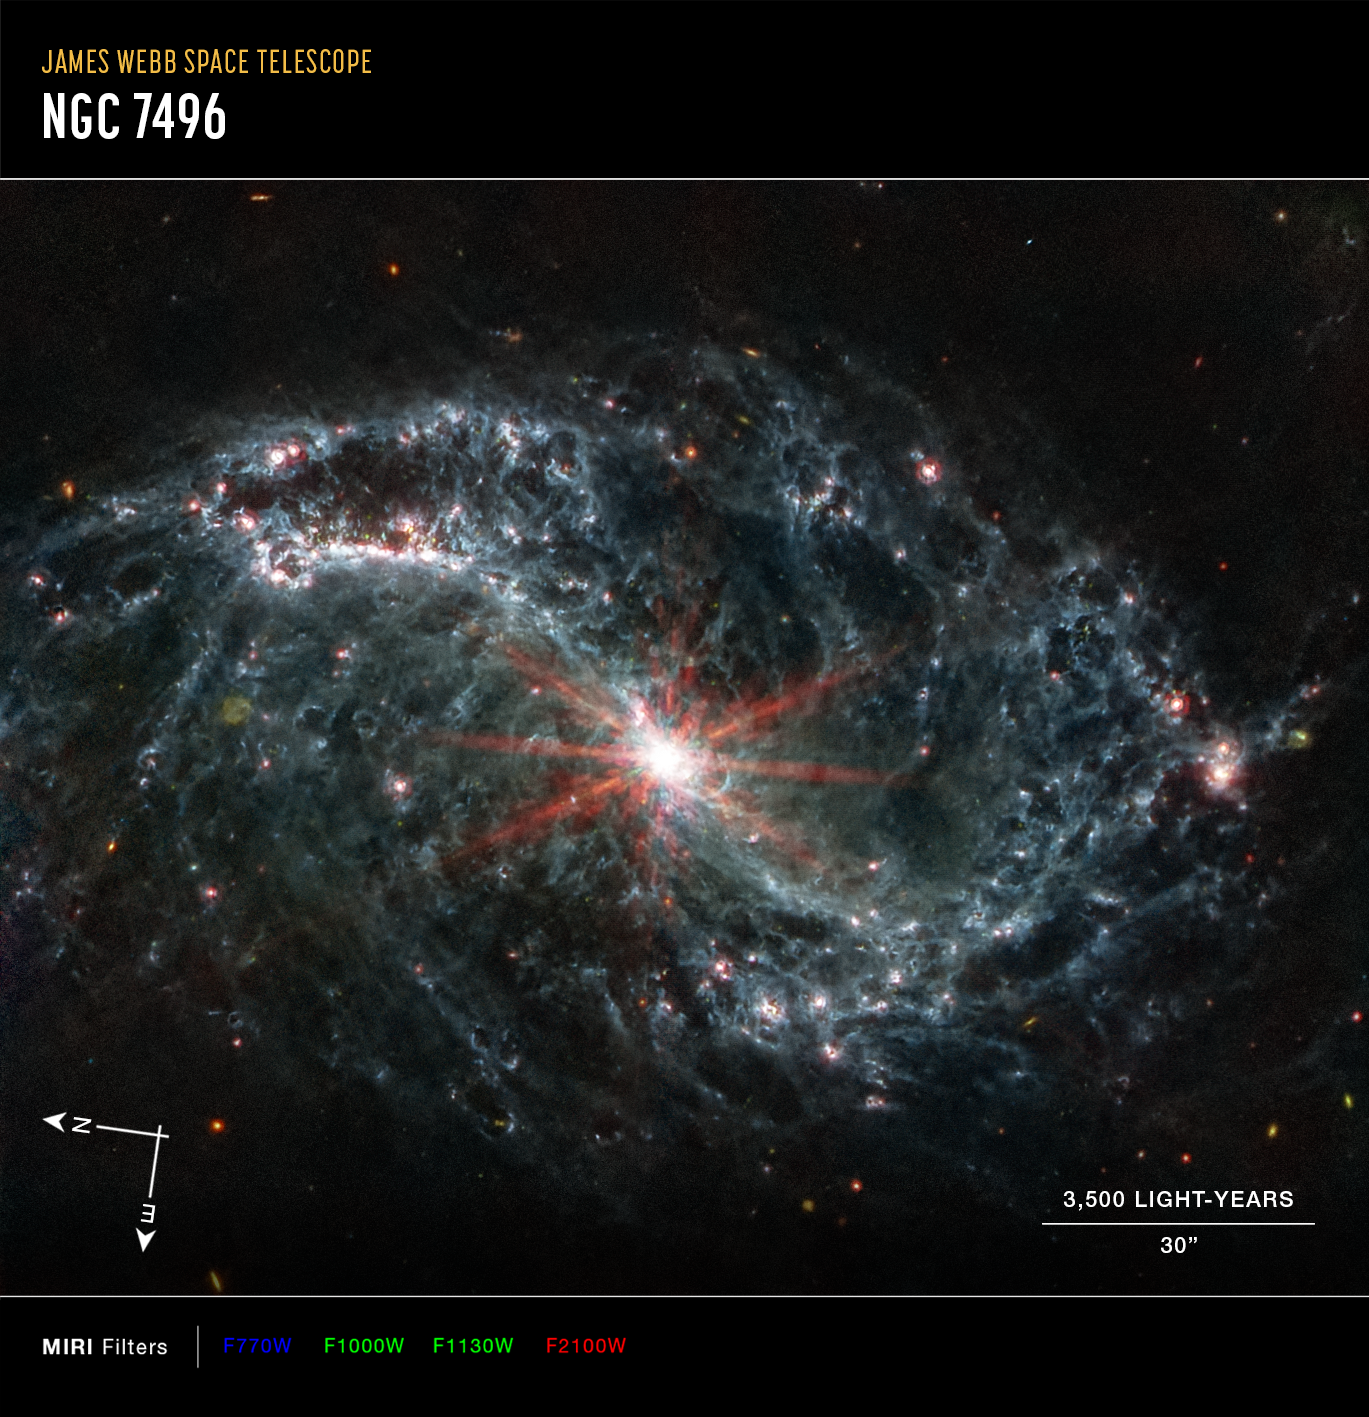

NGC 7496 (MIRI Image - Annotated)

This image of the nearby galaxy NGC 1433, captured by Webb’s Mid-Infrared Instrument (MIRI) shows compass arrows, scale bar, and color key for reference.

The north and east compass arrows show the orientation of the image on the sky. Note that the relationship between north and east on the sky (as seen from below) is flipped relative to direction arrows on a map of the ground (as seen from above). At the lower right is a scale bar labeled 3,500 light-years, 30 arcseconds. The length of the scale bar is approximately one-fifth the total width of the image. Below the image is a color key showing which MIRI filters were used to create the image and which visible-light color is assigned to each filter. In this image of NGC 7496, blue, green, and red were assigned to Webb’s MIRI data at 7.7, 10 and 11.3, and 21 microns (the F770W, F1000W and F1130W, and F2100W filters, respectively).

Scientists are getting their first look with the NASA/ESA/CSA James Webb Space Telescope’s powerful resolution at how the formation of young stars influences the evolution of nearby galaxies. The spiral arms of NGC 7496, one of a total of 19 galaxies targeted for study by the Physics at High Angular resolution in Nearby Galaxies (PHANGS) collaboration, are filled with cavernous bubbles and shells overlapping one another in this image from Webb’s Mid-Infrared Instrument (MIRI). These filaments and hollow cavities are evidence of young stars releasing energy and, in some cases, blowing out the gas and dust of the interstellar medium they plough into.

Until Webb’s high resolution at infrared wavelengths came along, stars at the earliest point of their lifecycle in nearby galaxies like NGC 7496 remained obscured by gas and dust. Webb’s specific wavelength coverage (7.7 and 11.3 microns), allows for the detection of polycyclic aromatic hydrocarbons, which play a critical role in the formation of stars and planets. In Webb’s MIRI image, these are mostly found within the main dust lanes in the spiral arms.

In their analysis of the new data from Webb, scientists were able to identify nearly 60 new, undiscovered embedded cluster candidates in NGC 7496. These newly identified clusters could be among the youngest stars in the entire galaxy.

At the centre of NGC 7496, a barred spiral galaxy, is an active galactic nucleus (AGN). An AGN is a supermassive black hole that is emitting jets and winds. The AGN glows brightly at the centre of this Webb image. Additionally, Webb’s extreme sensitivity also picks up various background galaxies, far distant from NGC 7496, which appear green or red in some instances.

NGC 7496 lies over 24 million light-years away from Earth in the constellation Grus.

MIRI was contributed by ESA and NASA, with the instrument designed and built by a consortium of nationally funded European Institutes (The MIRI European Consortium) and NASA’s Jet Propulsion Laboratory, in partnership with the University of Arizona.

Credit: NASA, ESA, CSA, and J. Lee (NOIRLab), A. Pagan (STScI)